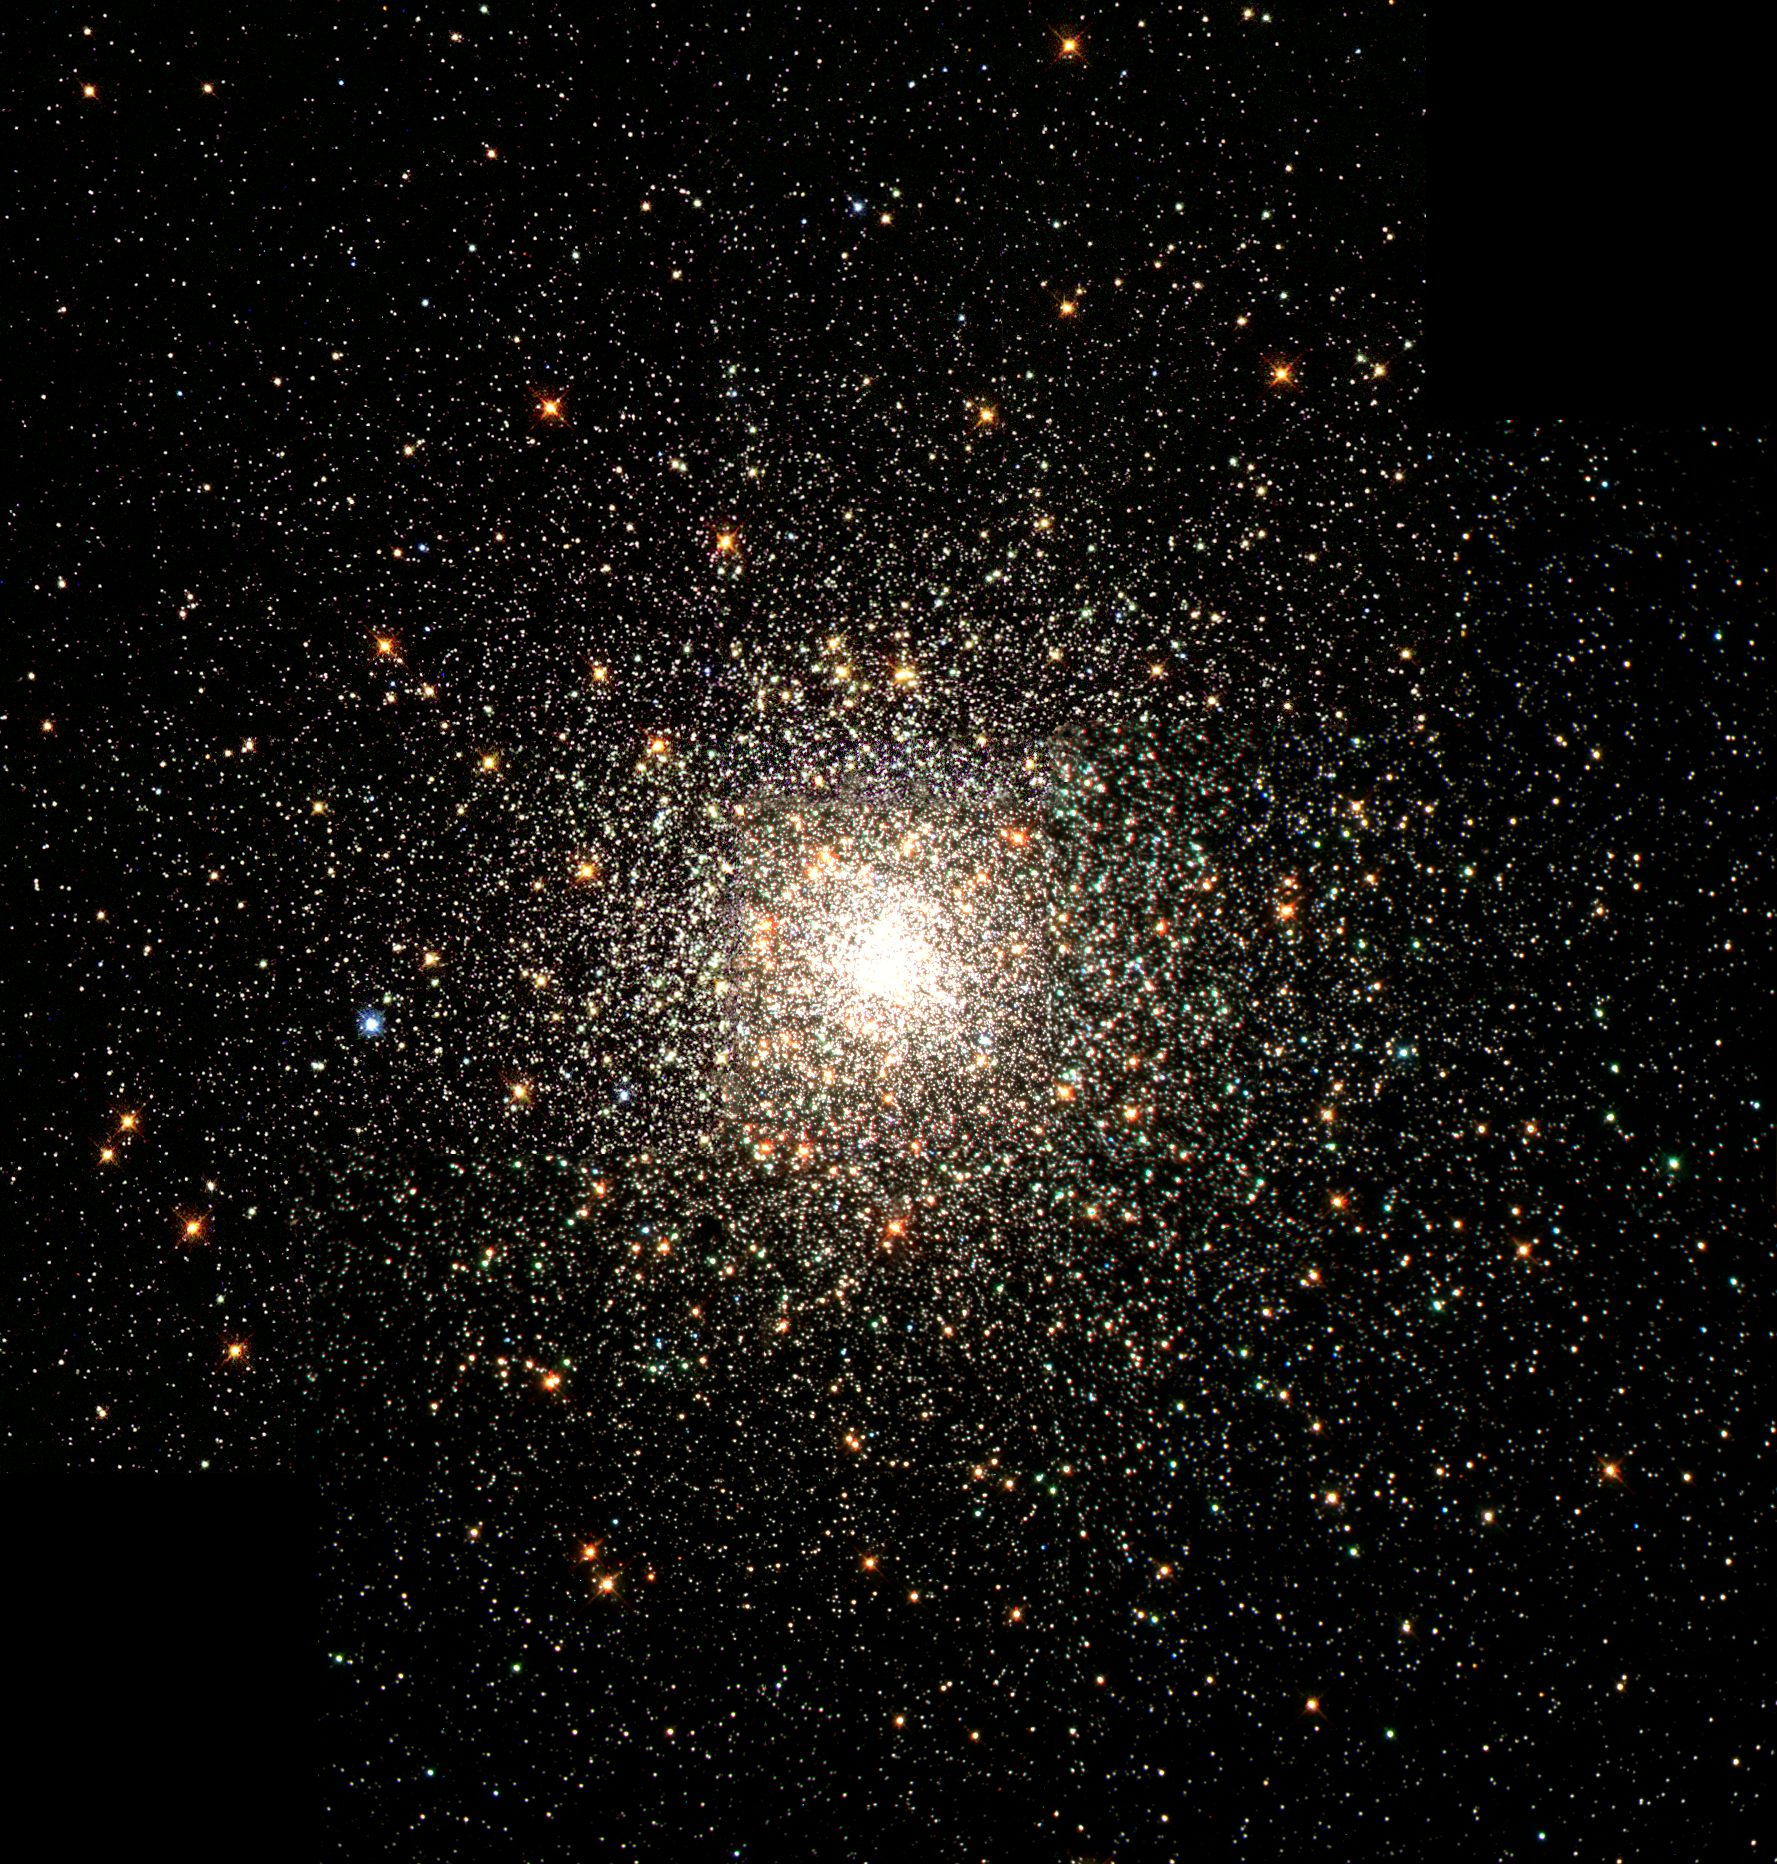

Hubble images a swarm of ancient stars

This stellar swarm is M80 (NGC 6093), one of the densest of the 147 known globular star clusters in the Milky Way galaxy. Located about 28,000 light-years from Earth, M80 contains hundreds of thousands of stars, all held together by their mutual gravitational attraction. Globular clusters are particularly useful for studying stellar evolution, since all of the stars in the cluster have the same age (about 15 billion years), but cover a range of stellar masses.

Every star visible in this image is either more highly evolved than, or in a few rare cases more massive than, our own Sun. Especially obvious are the bright red giants, which are stars similar to the Sun in mass that are nearing the ends of their lives.

Credit: The Hubble Heritage Team (AURA/STScI/NASA/ESA)